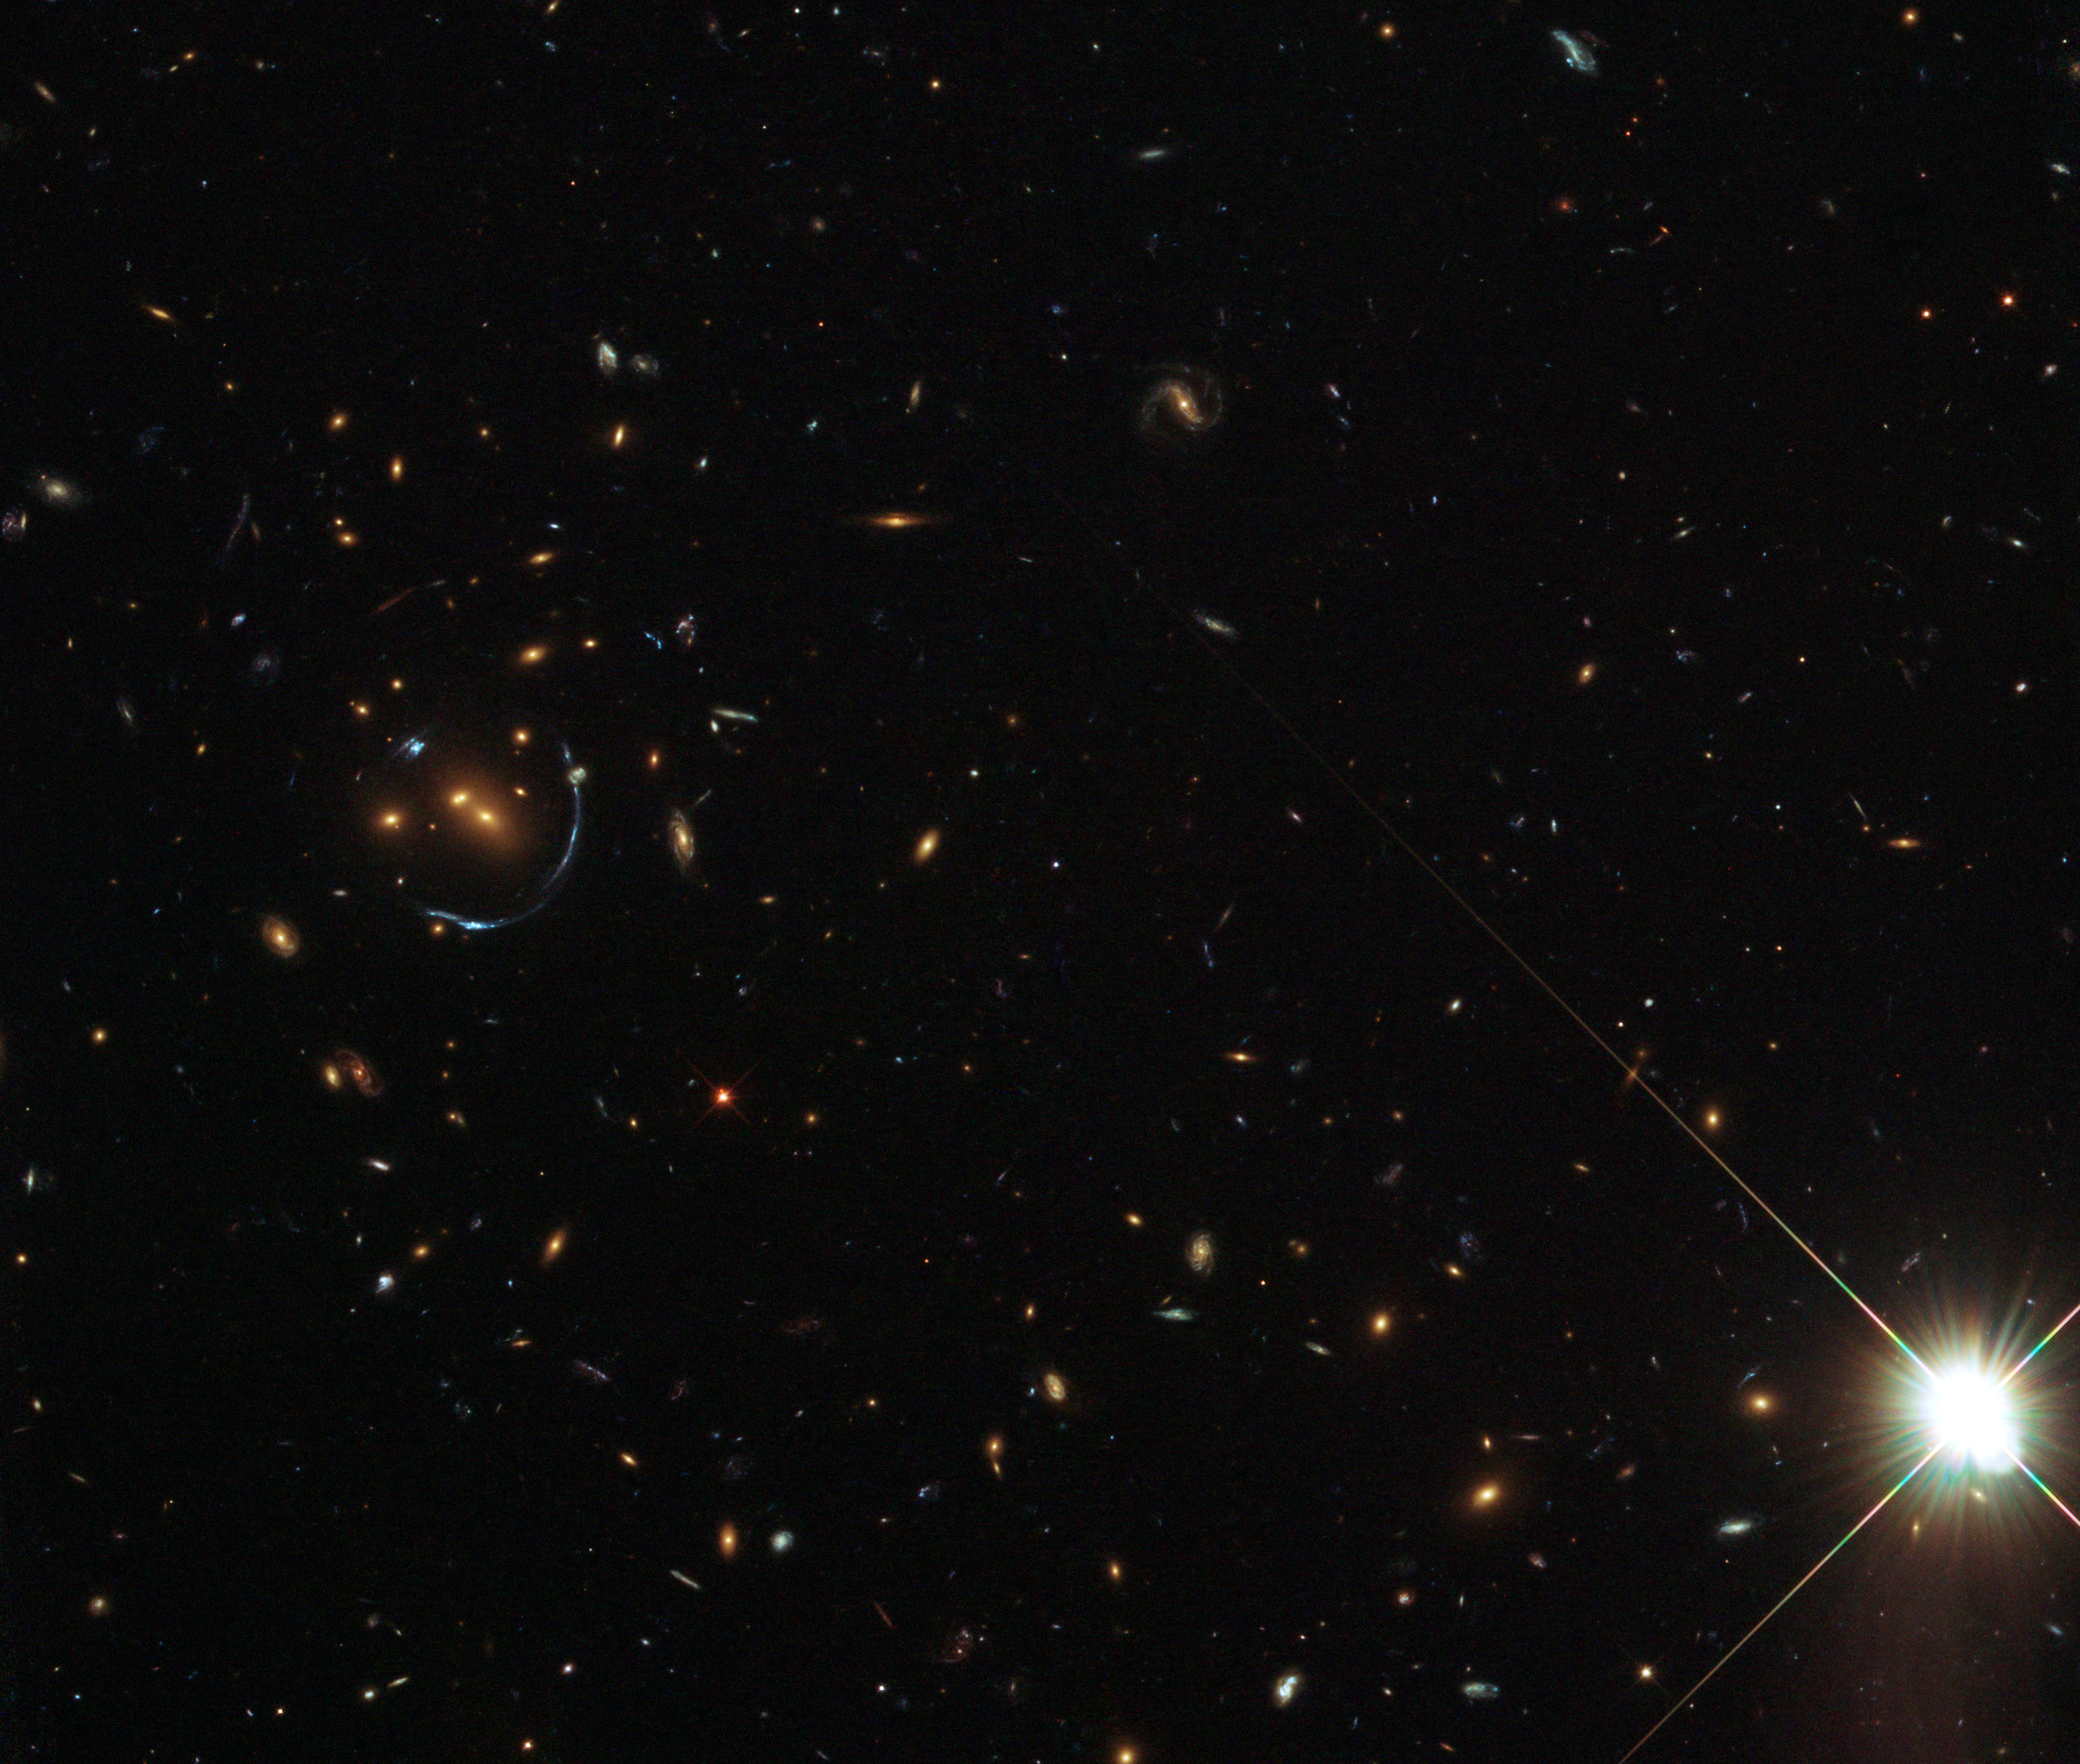

An arc sculpted by gravity

This NASA/ESA Hubble Space Telescope image shows remarkable structures in a galaxy cluster around an object called LRG-4-606. LRG stands for Luminous Red Galaxy, and is the acronym given to a large collection of bright red galaxies found in the Sloan Digital Sky Survey (SDSS). These objects are mostly massive elliptical galaxies composed of huge numbers of old stars.

It is sobering to contemplate the sheer number of stars that this image must contain — hundreds of billions — but it also features one of the strangest phenomena known to astronomers. This particular red galaxy and its surrounding galaxies happen to be positioned so that their strong gravitational field has a dramatic effect.

Left of centre in the picture, blue galaxies in the background have been stretched and warped out of shape into narrow, pale blue arcs. This is because of an effect called gravitational lensing. The galaxy cluster has such a strong gravitational field that it is curving the fabric of space and amplifying the starlight from much more distant galaxies. Gravitational lensing normally creates elongated arcs and here, unusually, the alignment of the galaxies has made the separate arcs combine to form a half-circle.

This picture was assembled from a collection of exposures in visible and near infrared light taken with Hubble’s Wide Field Camera 3. The field of view is approximately 3 by 3 arcminutes.

Credit: ESA/Hubble & NASA